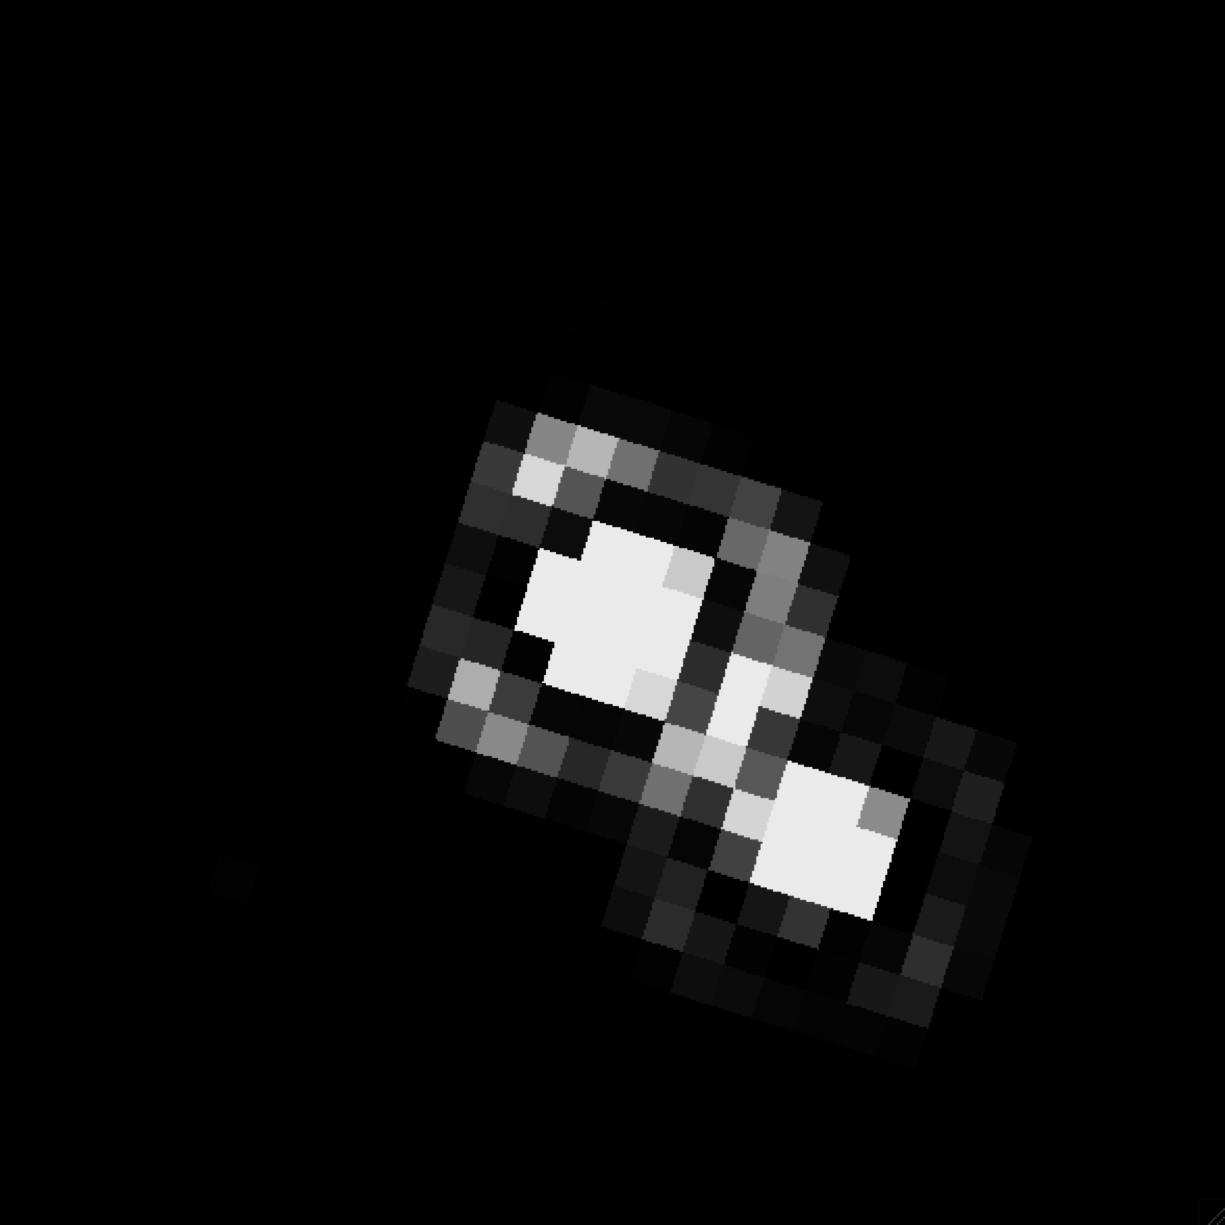

Binary L dwarf Kelu-1 (31 July 2005)

This pixelated image taken by the ESO/NASA Hubble Space Telescope shows the system Kelu-1. This star systems consists of two brown dwarfs and is located in the constellation of Hydra, 61 light years away. It is among the first brown dwarf dicovered, which were not part of a system containing a later-than-M-type star.

Observations made between 2005 and 2008 by a german team of astronomers who used data from Hubble, the Very Large Telescope and the Spitzer Space Telescope suggest, that the system even contains a third, so far undetected, component.

Credit: NASA, ESA and M. Stumpf (MPIA)